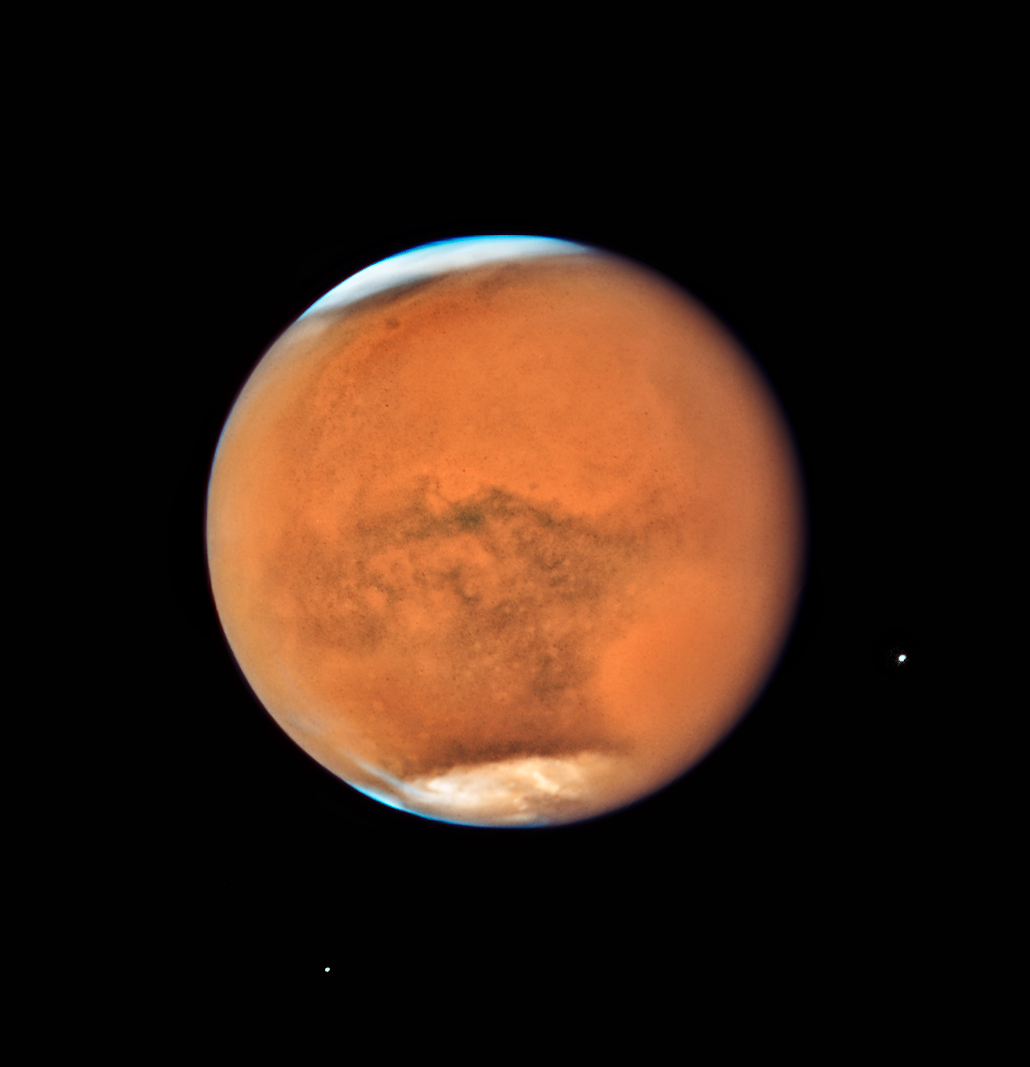

Stormy Mars in opposition in 2018

In mid-July the NASA/ESA Hubble Space Telescope observed Mars, only 13 days before the planet made its closest approach to Earth in 2018. While previous images showed detailed surface features of the planet, this new image is dominated by a gigantic sandstorm enshrouding the entire planet.

Each Martian year, moderately large dust storms cover continent-sized areas and last for weeks at a time. Global dust storms — lasting for weeks or months — tend to happen during the spring and summer in the southern hemisphere, when Mars is closest to the Sun and heating is at a maximum, leading to greater generation of winds.

While spacecraft orbiting Mars can study the storm’s behaviour at lower altitudes, Hubble observations allow astronomers to study changes in the higher atmosphere. The combined observations will help planetary scientists to build a better understanding of how these global storms arise.

Credit: NASA, ESA, and STScI